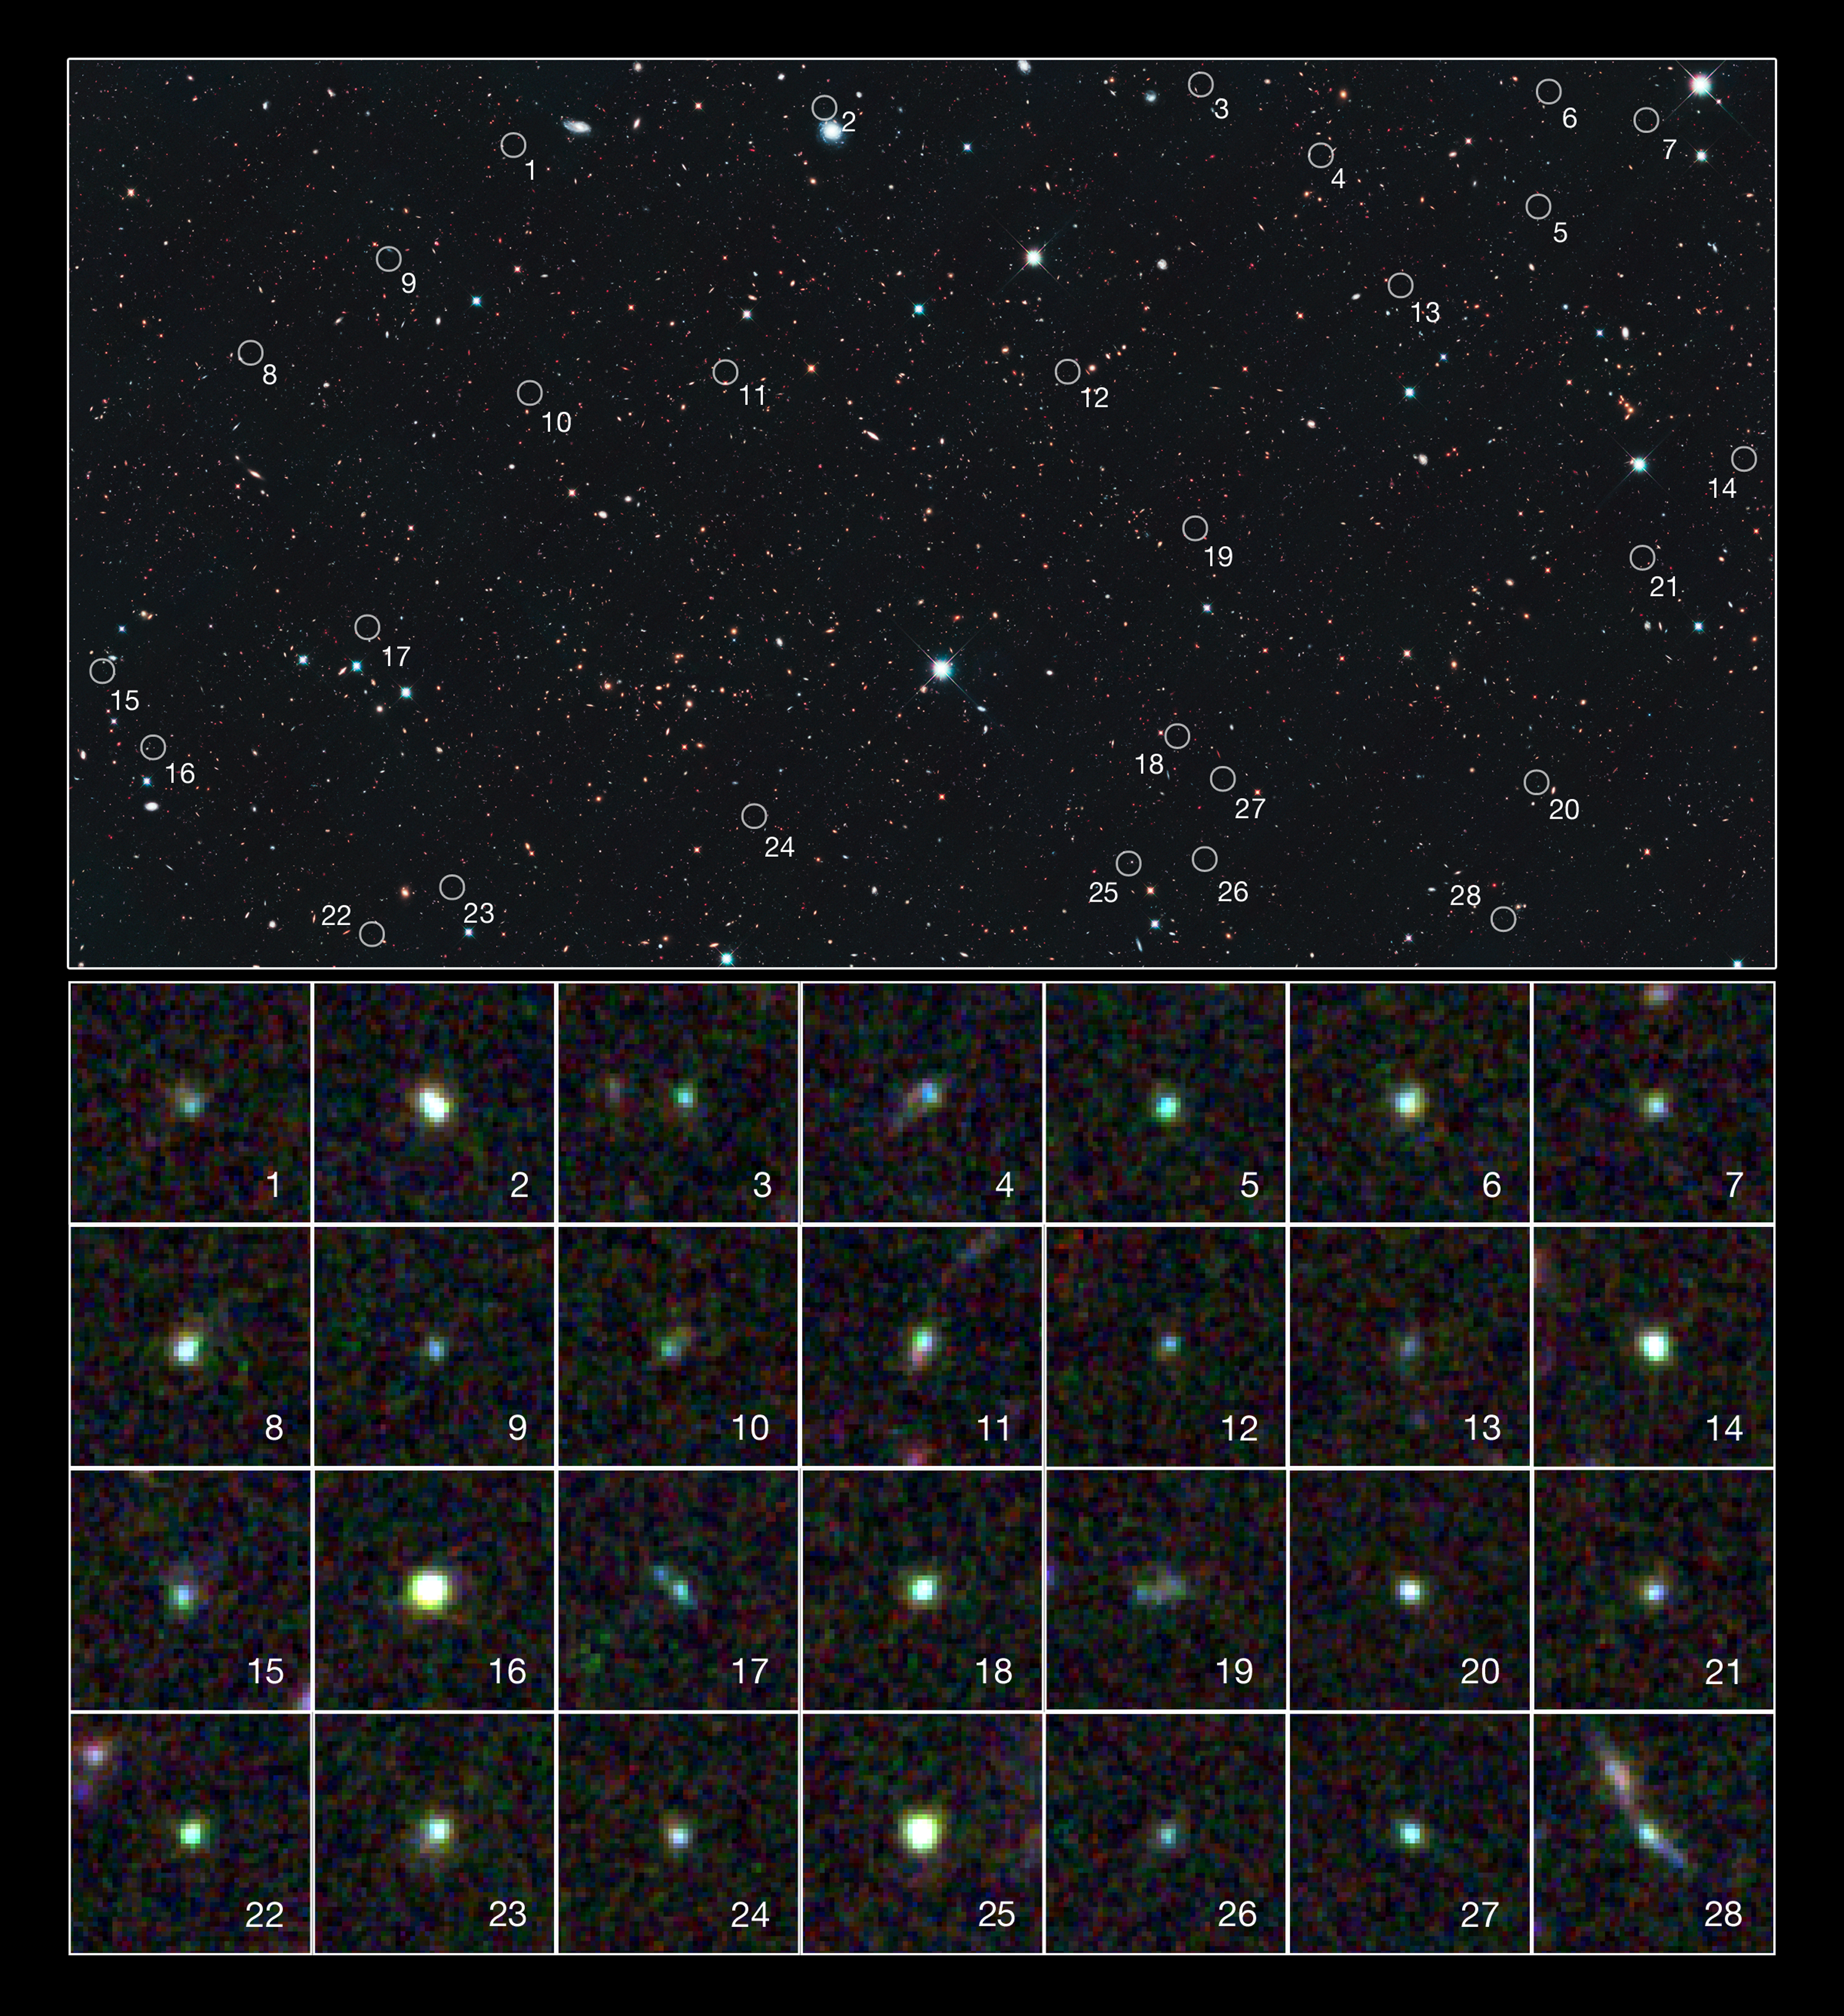

Hubble spies tiny galaxies aglow with star birth

This image reveals 28 tiny galaxies uncovered by the NASA/ESA Hubble Space Telescope. The puny galaxies, shown in the postage-stamp-sized images, existed 9 billion years ago and are brimming with star birth.

The dwarf galaxies are typically a hundred times less massive than the Milky Way galaxy but are churning out stars at such a furious pace that their stellar population would double in just 10 million years. Hubble's Wide Field Camera 3 and Advanced Camera for Surveys spied the galaxies in a field called the UKIDSS Ultra Deep Survey, or UDS, (part of the UKIRT Infrared Deep Sky Survey). The galaxies' locations in the UDS field are marked in the large image.

The galaxies stood out in the Hubble images because the energy from all the new stars caused the oxygen in the gas surrounding them to light up like a bright fluorescent sign. The rapid star birth likely represents an important phase in the formation of dwarf galaxies, the most common galaxy type in the cosmos.

The galaxies are among 69 dwarf galaxies found in the UDS and other fields. The images were made from observations taken between August and December 2010.

Credit: NASA, ESA, A. van der Wel (Max Planck Institute for Astronomy), H. Ferguson and A. Koekemoer (Space Telescope Science Institute), and the CANDELS team